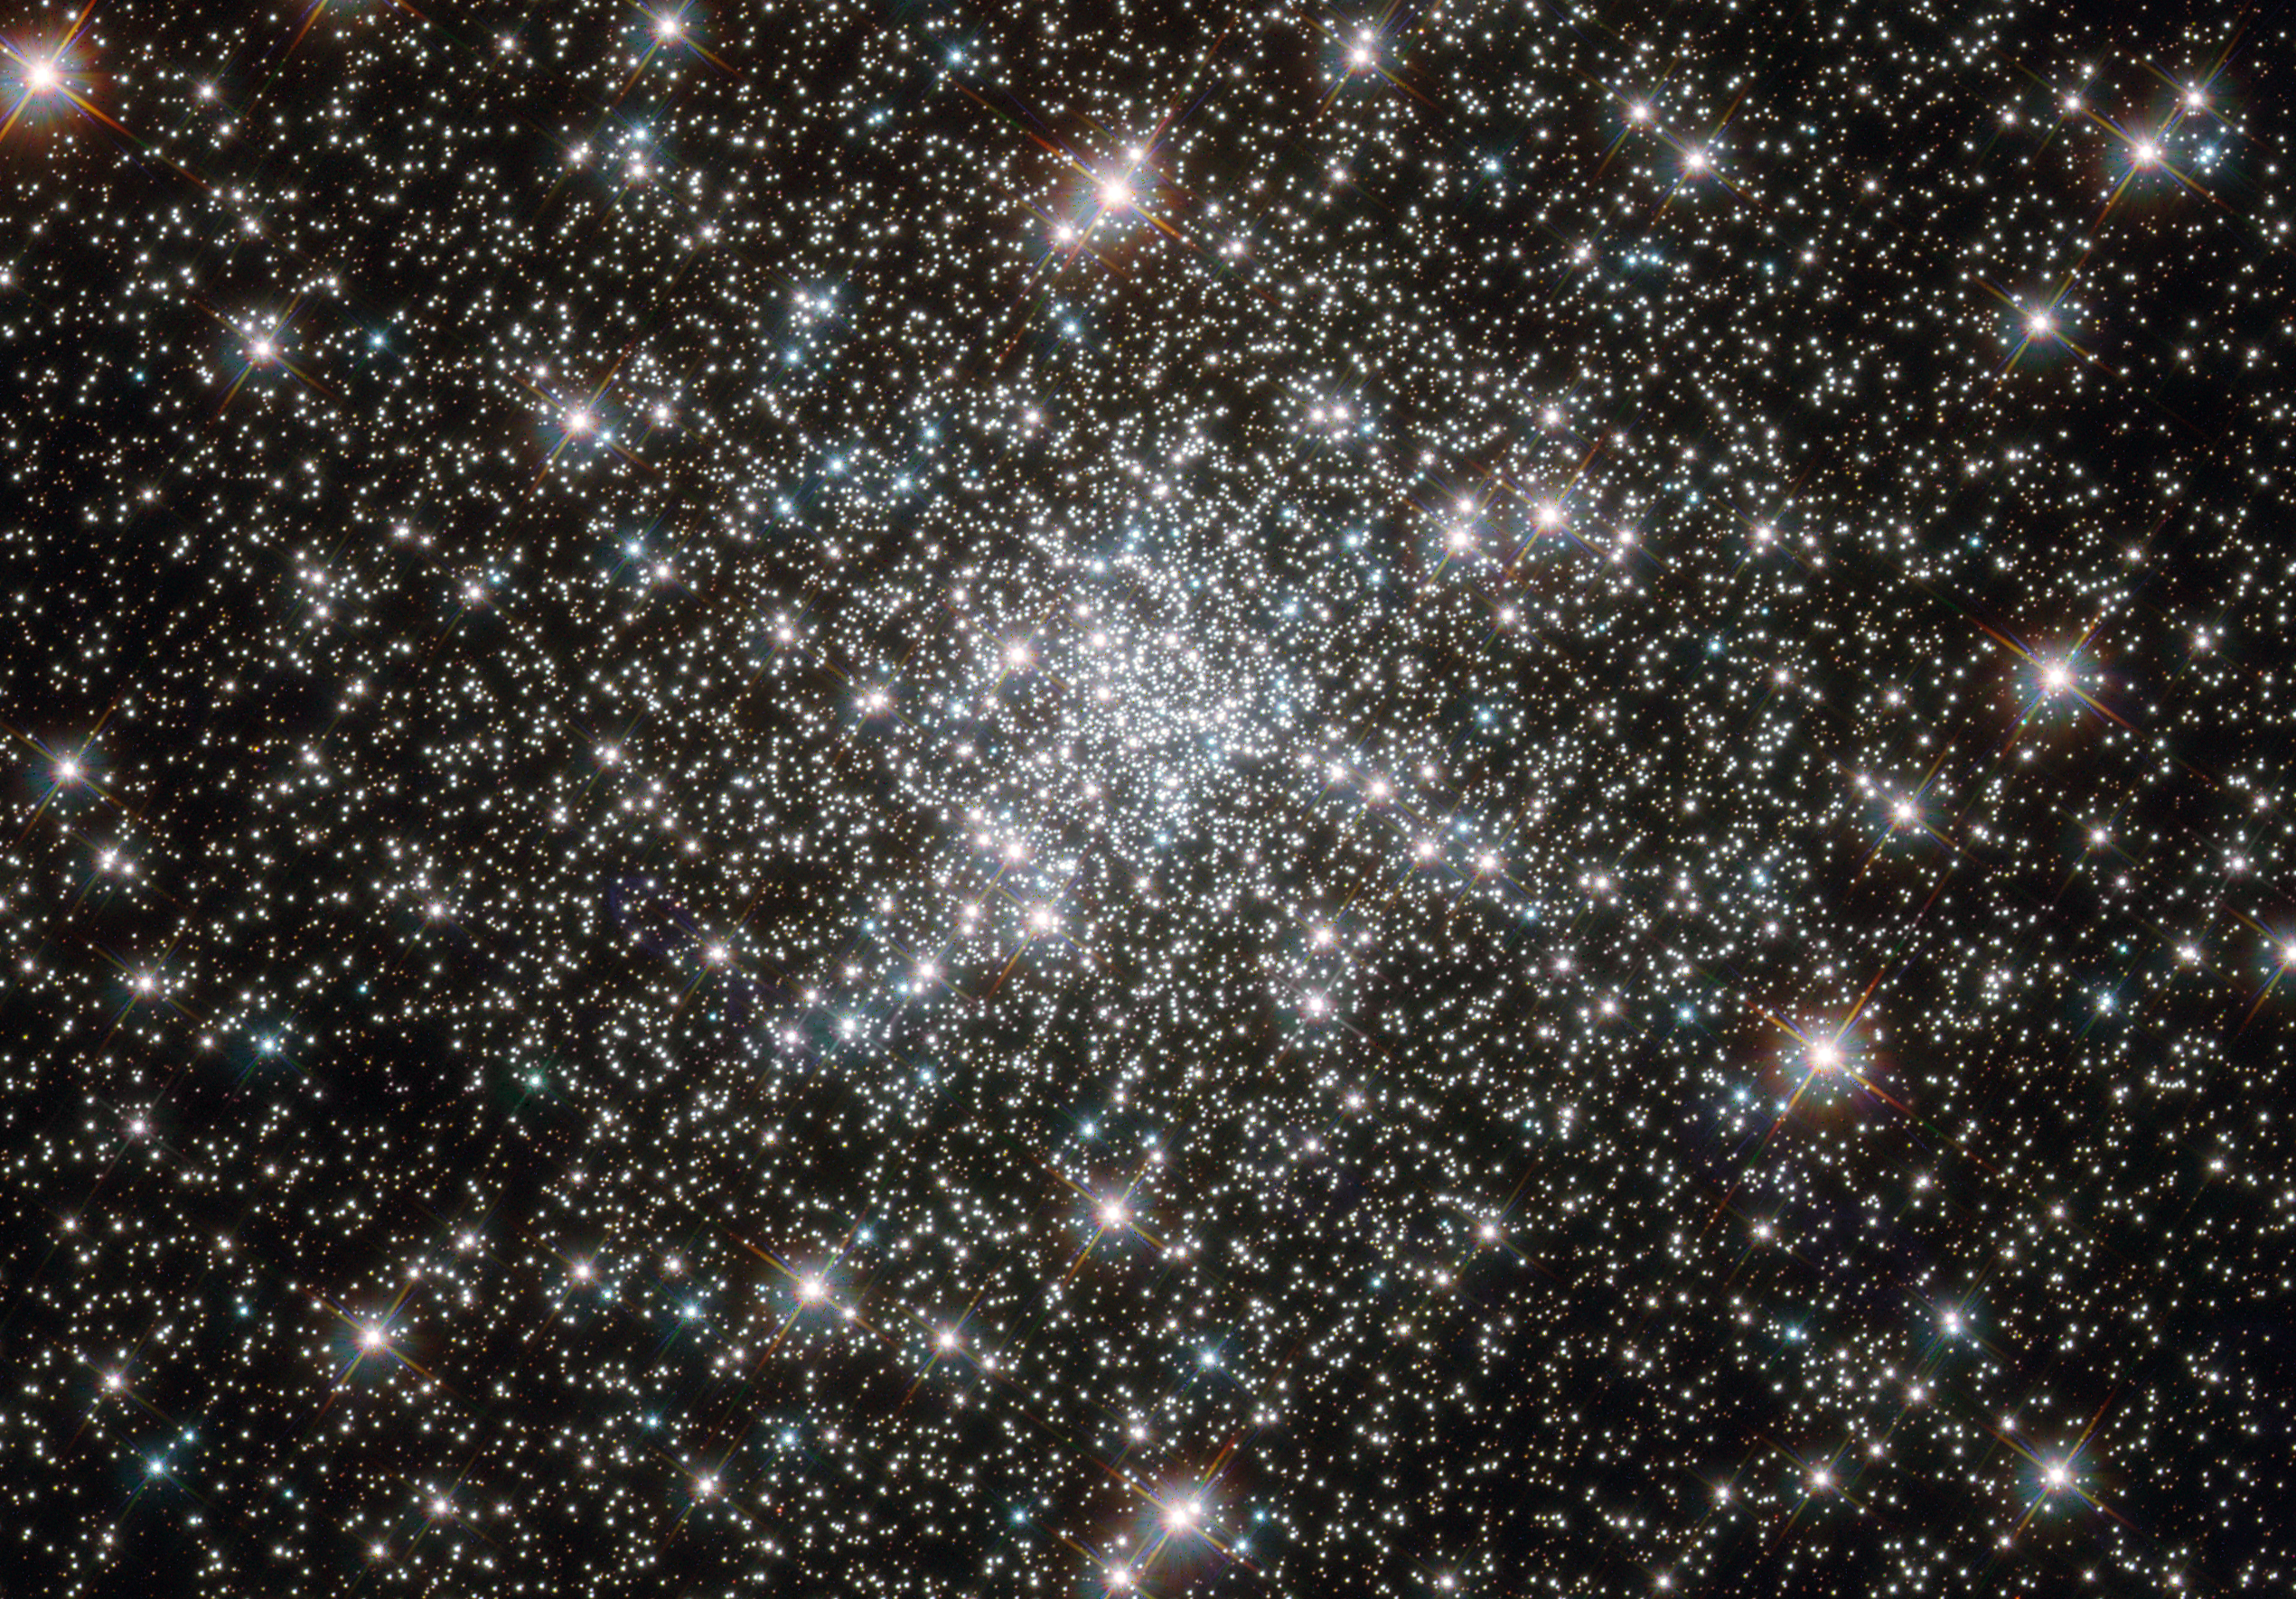

Young stars at home in an ancient cluster

Looking like a hoard of gems fit for an emperor’s collection, this deep sky object called NGC 6752 is in fact far more worthy of admiration. It is a globular cluster, and at over 10 billion years old is one the most ancient collections of stars known. It has been blazing for well over twice as long long as our Solar System has existed.

NGC 6752 contains a high number of “blue straggler” stars, some of which are visible in this image. These stars display characteristics of stars younger than their neighbours, despite models suggesting that most of the stars within globular clusters should have formed at approximately the same time. Their origin is therefore something of a mystery.

Studies of NGC 6752 may shed light on this situation. It appears that a very high number — up to 38% — of the stars within its core region are binary systems. Collisions between stars in this turbulent area could produce the blue stragglers that are so prevalent.

Lying 13 000 light-years distant, NGC 6752 is far beyond our reach, yet the clarity of Hubble’s images brings it tantalisingly close.

Credit: ESA/Hubble & NASA